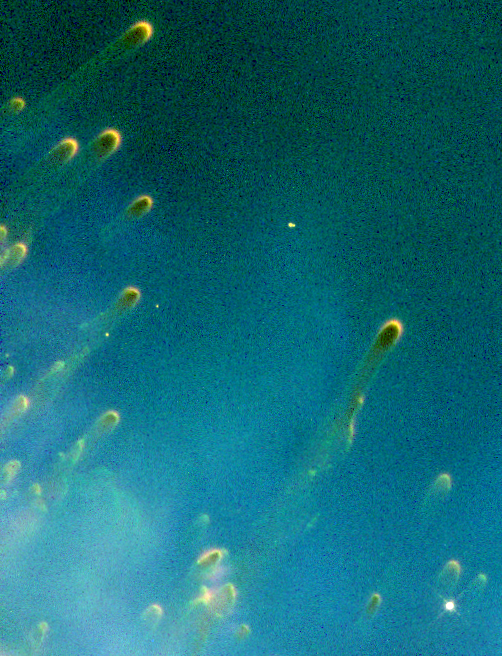

Cometary Knots around a Dying Star

These gigantic, tadpole-shaped objects are probably the result of a dying star's last gasps. Dubbed 'cometary knots' because their glowing heads and gossamer tails resemble comets, the gaseous objects probably were formed during a star's final stages of life.

Credit: Robert O'Dell, Kerry P. Handron (Rice University, Houston, Texas) and NASA/ESA